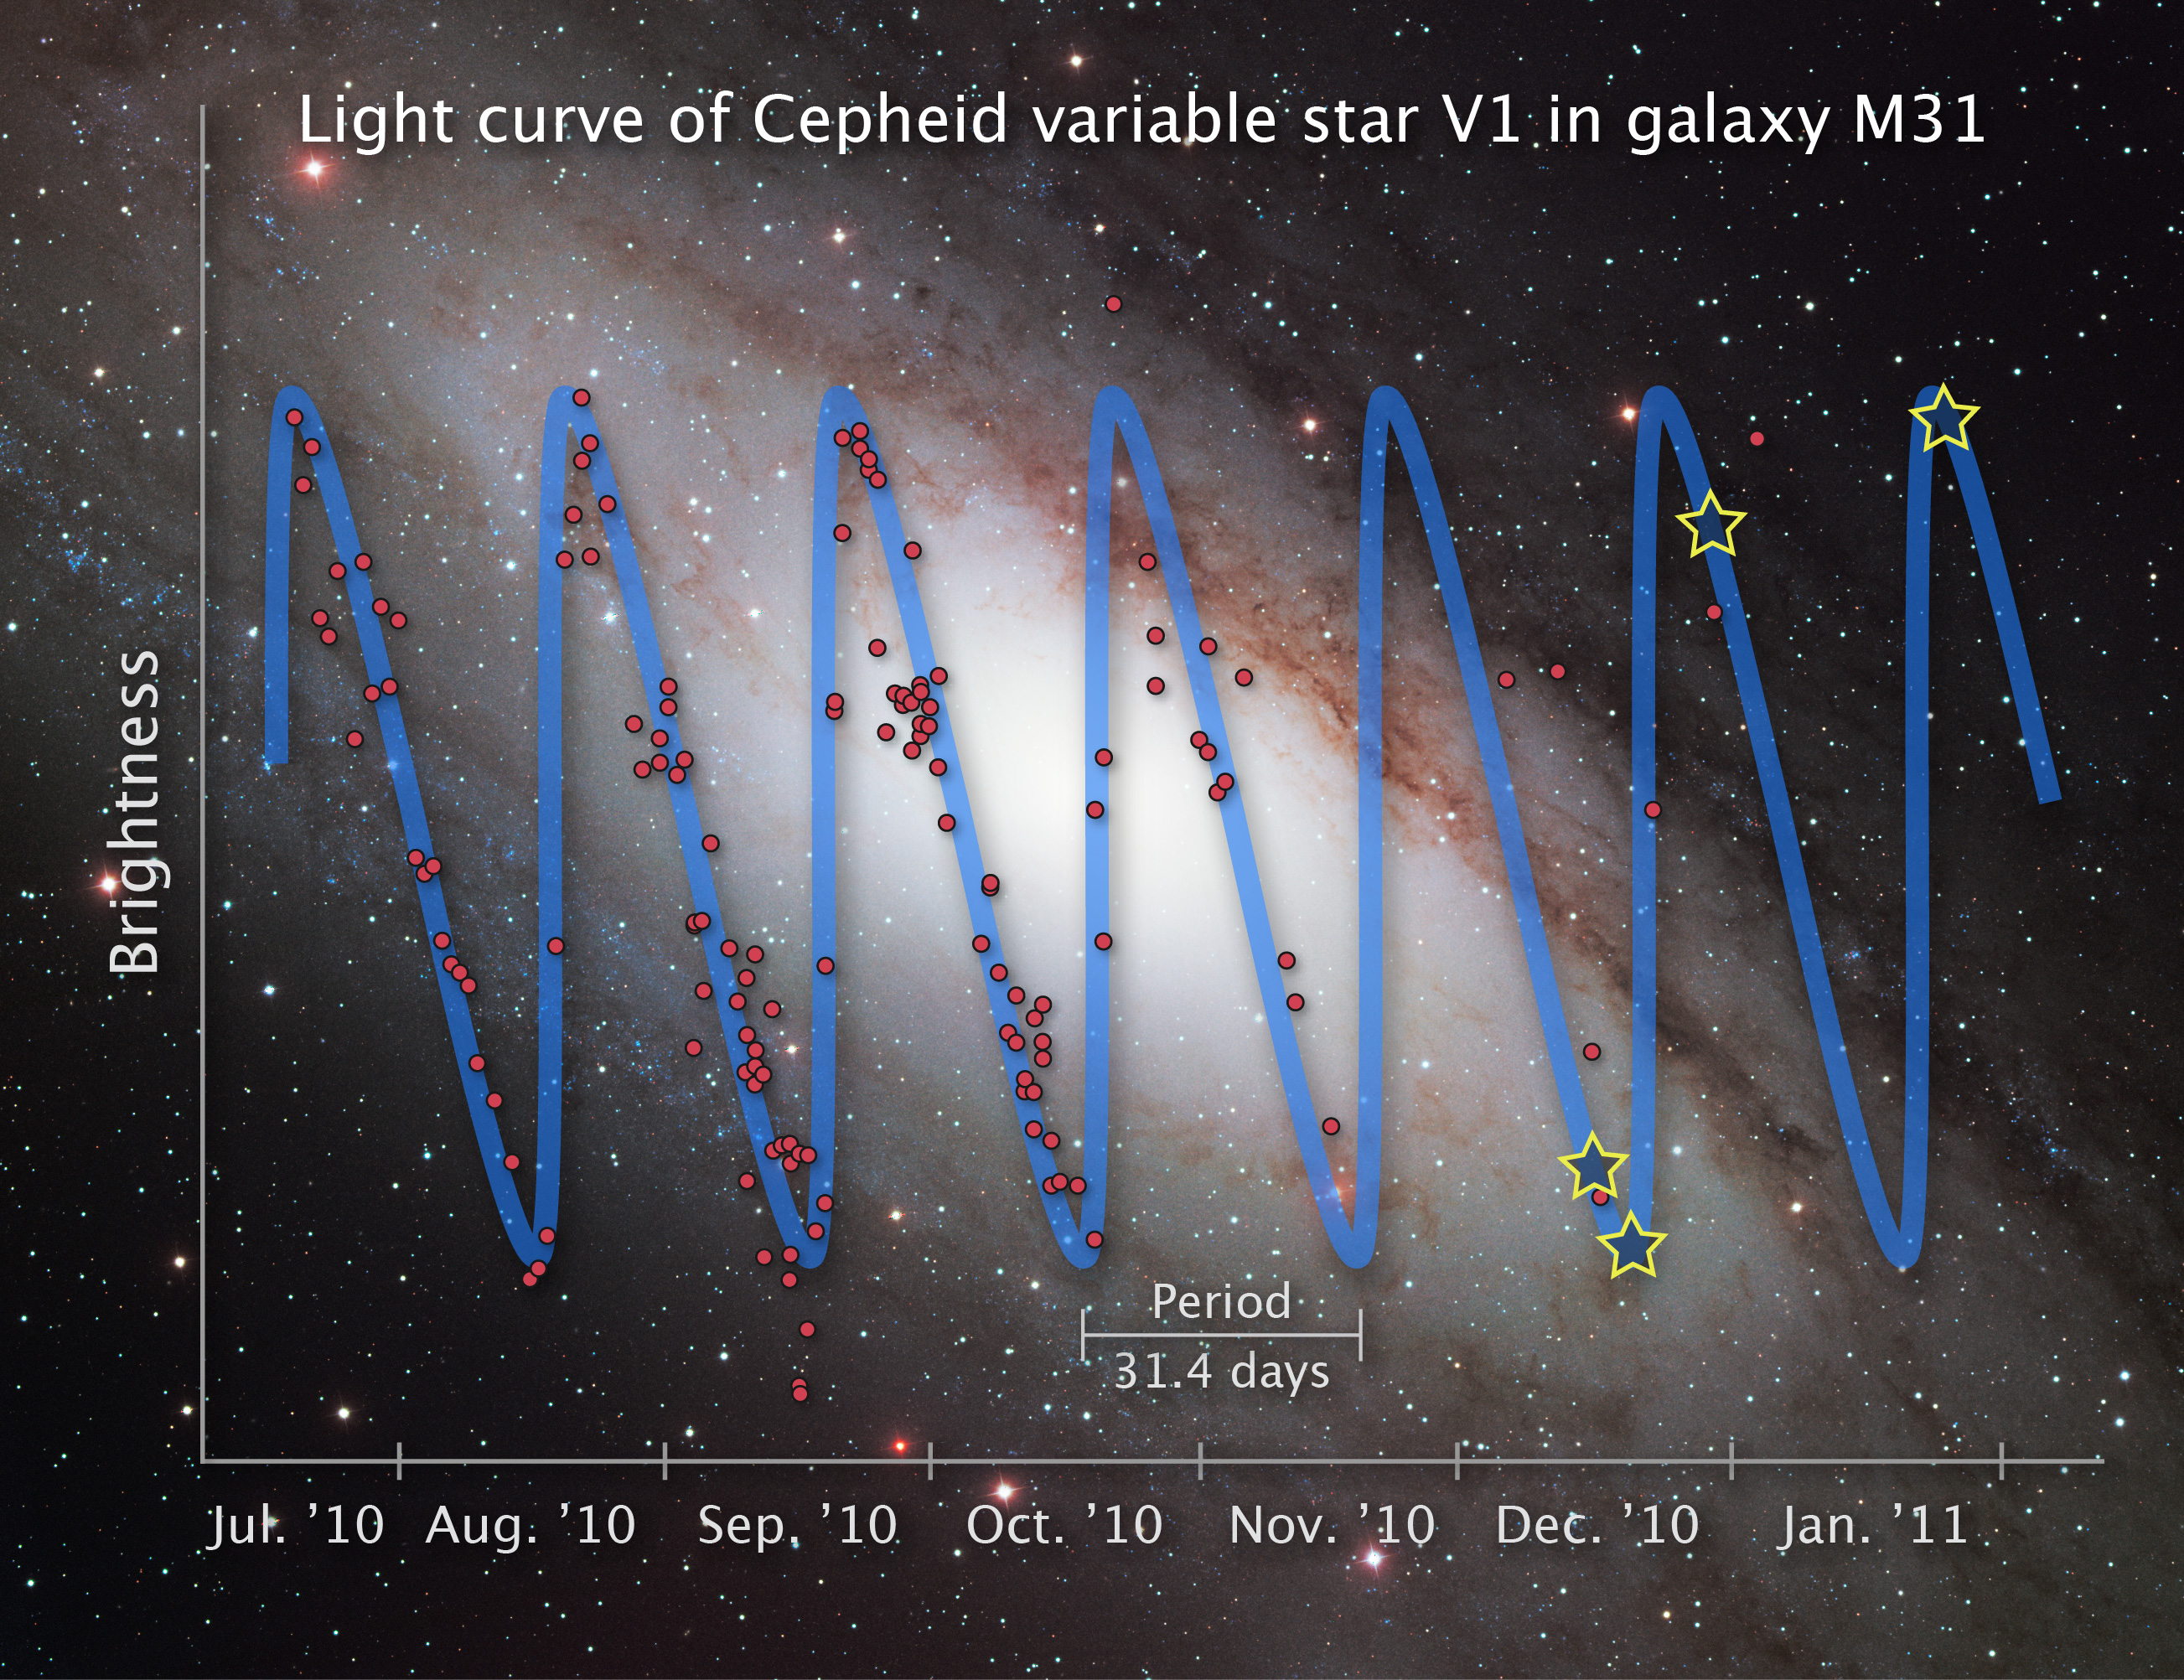

Light curve of Cepheid variable star V1

This illustration shows the rhythmic rise and fall of starlight from the Cepheid variable star V1 over a seven-month period.

Cepheid variables are pulsating stars that brighten and fade in a predictable pattern. The illustrated graph shows that V1 completes a pulsation cycle every 31.4 days. The red dots on the graph represent observations by the American Association of Variable Star Observers (AAVSO), who partnered with the Space Telescope Science Institute's Hubble Heritage Project to study the star. The four stars on the graph denote observations made by the Hubble Space Telescope's Wide Field Camera 3.

Ten amateur astronomers from around the world made 214 observations of V1 between July 2010 and December 2010, obtaining four pulsation cycles. The AAVSO study allowed the Hubble Heritage team to target Hubble observations that would capture the star at its brightest and dimmest phases.

Credit: NASA, ESA and Z. Levay (STScI). Science Credit: NASA, ESA, the Hubble Heritage Team (STScI/AURA) and the American Association of Variable Star Observers